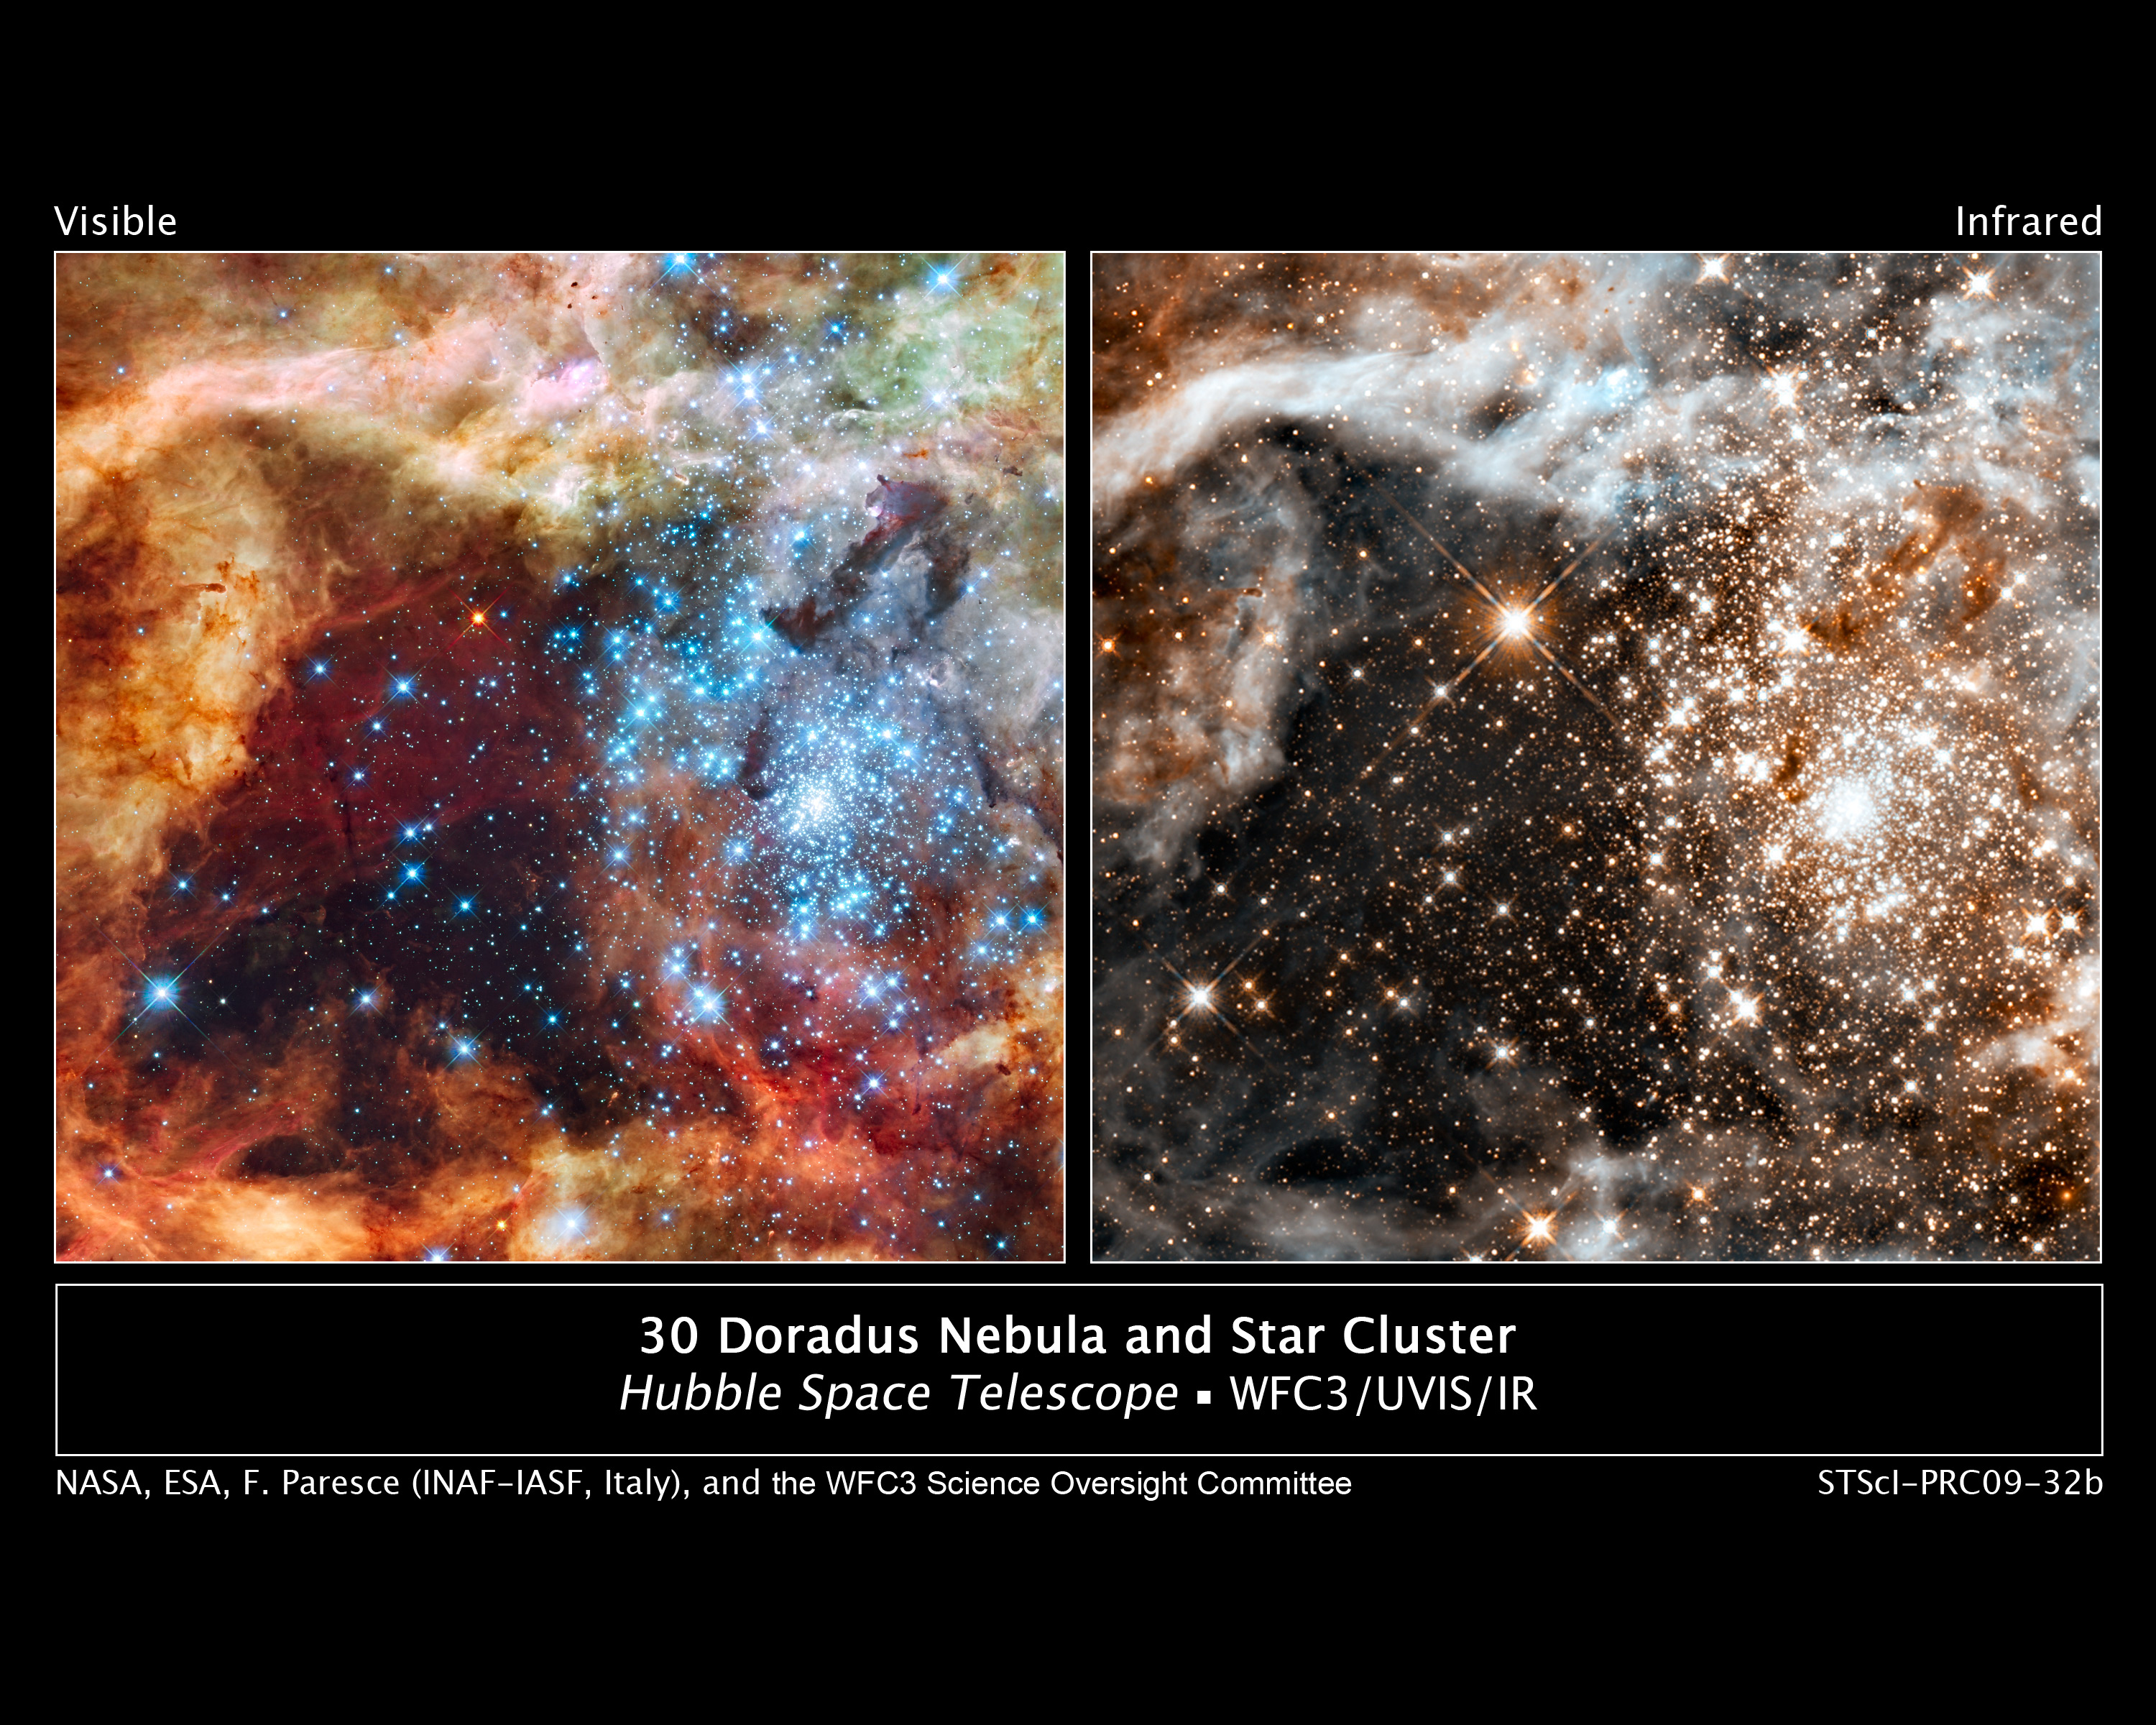

Hubble's grand view of star birth

These two images, taken in visible and infrared light by the Wide Field Camera 3 aboard NASA's Hubble Space Telescope, reveal a massive star cluster nestled in the largest stellar nursery in our local galactic neighborhood.

The massive, young stellar grouping, called R136, is only a few million years old and resides in the 30 Doradus Nebula, a turbulent star-birth region in the Large Magellanic Cloud (LMC), a satellite galaxy of our Milky Way. The nebula is close enough to Earth that Hubble can resolve individual stars, giving astronomers important information about the stars' birth and evolution.

In the image at left, taken in ultraviolet, visible, and red light, the stars look like icy blue diamonds. The green in the nebula is from the glow of oxygen and the red is from fluorescing hydrogen.

In the image at right, taken at infrared wavelengths, Hubble sees through the dusty nebula, revealing many stars that cannot be seen in the visible-light view. The large bright star just above the center of the image is in 30 Doradus. The observation was taken through two infrared filters (1.1 microns and 1.6 microns).

The Hubble observations of 30 Doradus were made Oct. 20-27, 2009.

Credit: NASA, ESA, F. Paresce (INAF-IASF, Bologna, Italy), R. O'Connell (University of Virginia, Charlottesville), and the Wide Field Camera 3 Science Oversight Committee